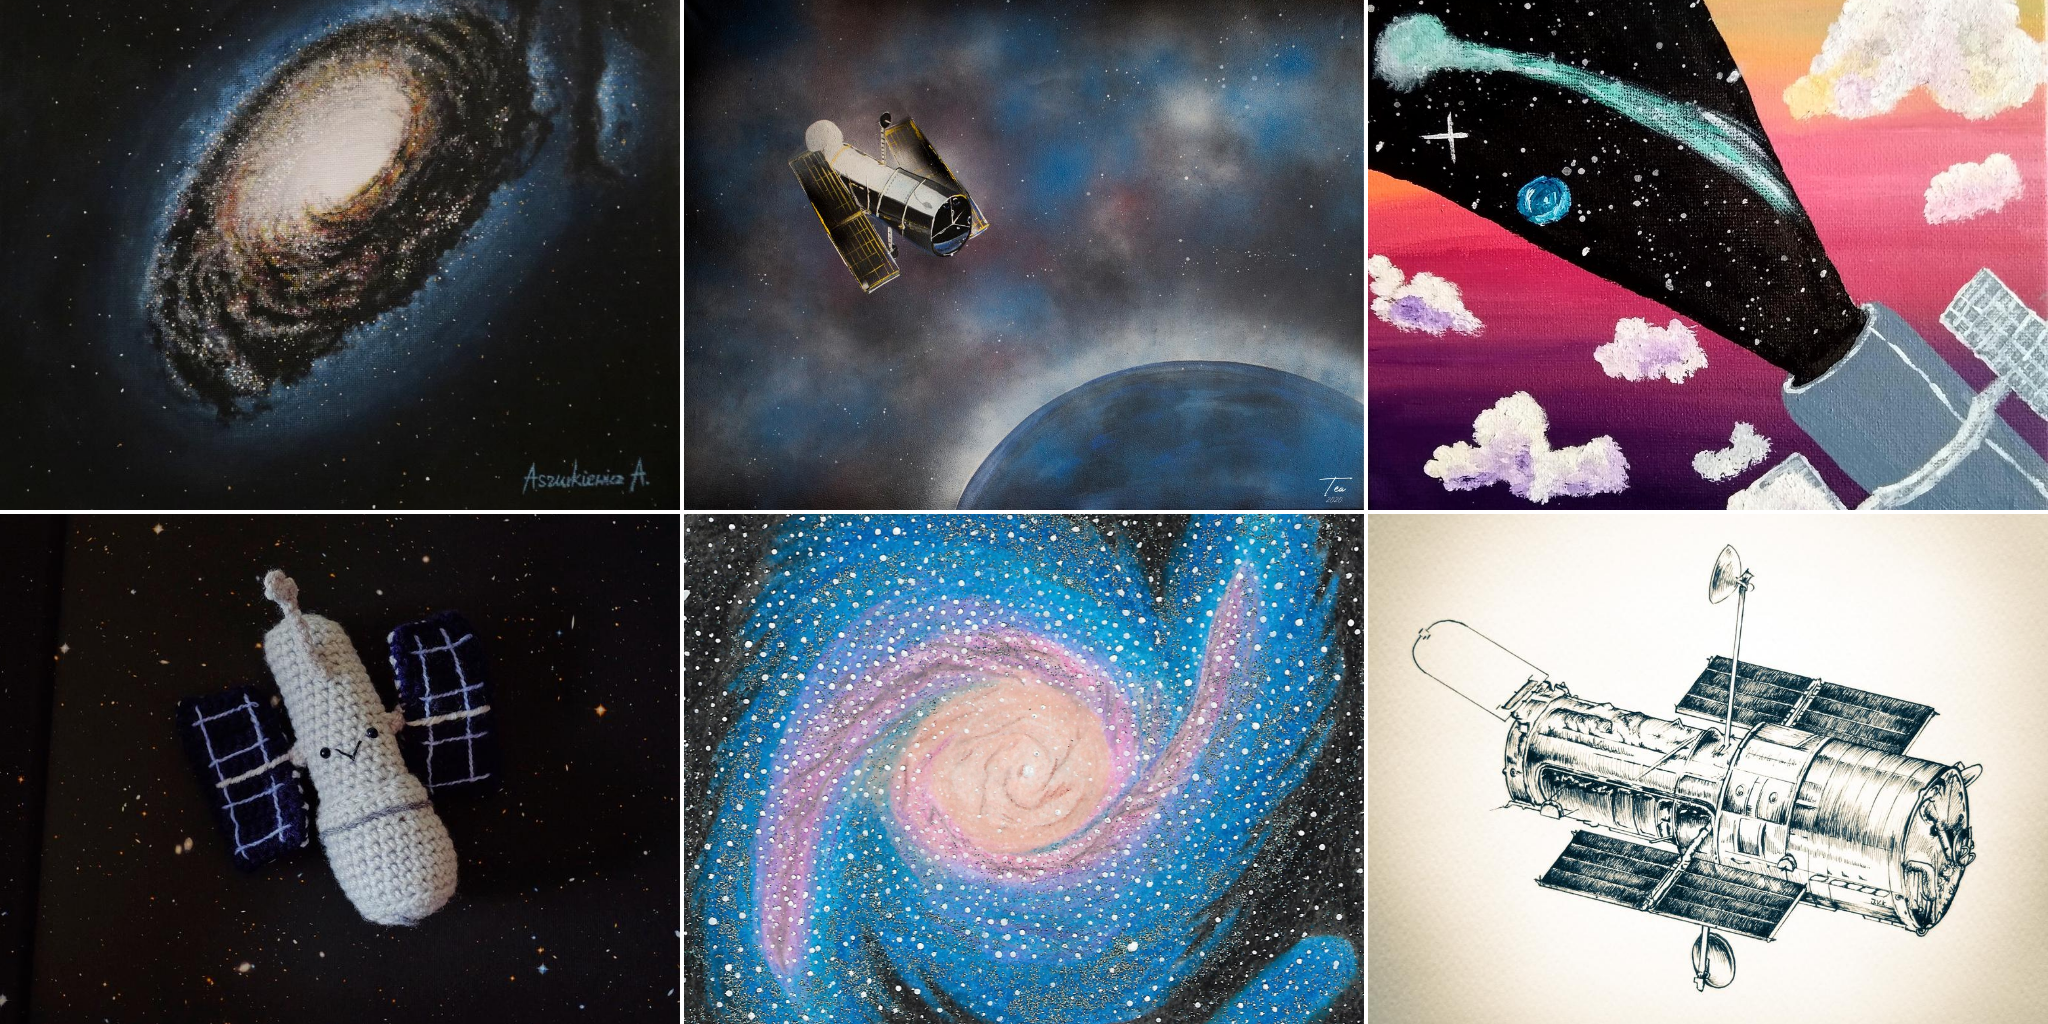

Collage of Hubble 30 Artistic Creations

A Flickr album has been published to showcase the variety of creations that were received. A special Hubblecast has also been created to feature some of the submitted creations received. We encourage you to explore and enjoy these beautiful Hubble-inspired creations!

Credit: Upper Left: ‘M64 (NGC 4826) "Black Eye"' - Adrianna Aszurkiewicz, PolandUpper Center: Hubble Dive Into the Blue" - Tea Mesarić, CroatiaUpper Right: “Looking Beyond the Clouds" - Catalina-Ana Miritescu, RomaniaLower Left: “Amigurumi Hubble by Ohioja" - Ylenia Tagliafraschi, ItalyLower Center: "Beyond Our Boundaries" - Helen Fragkouli, GreeceLower Right: "Vintage Hubble" - Josephine Kerutt, Germany